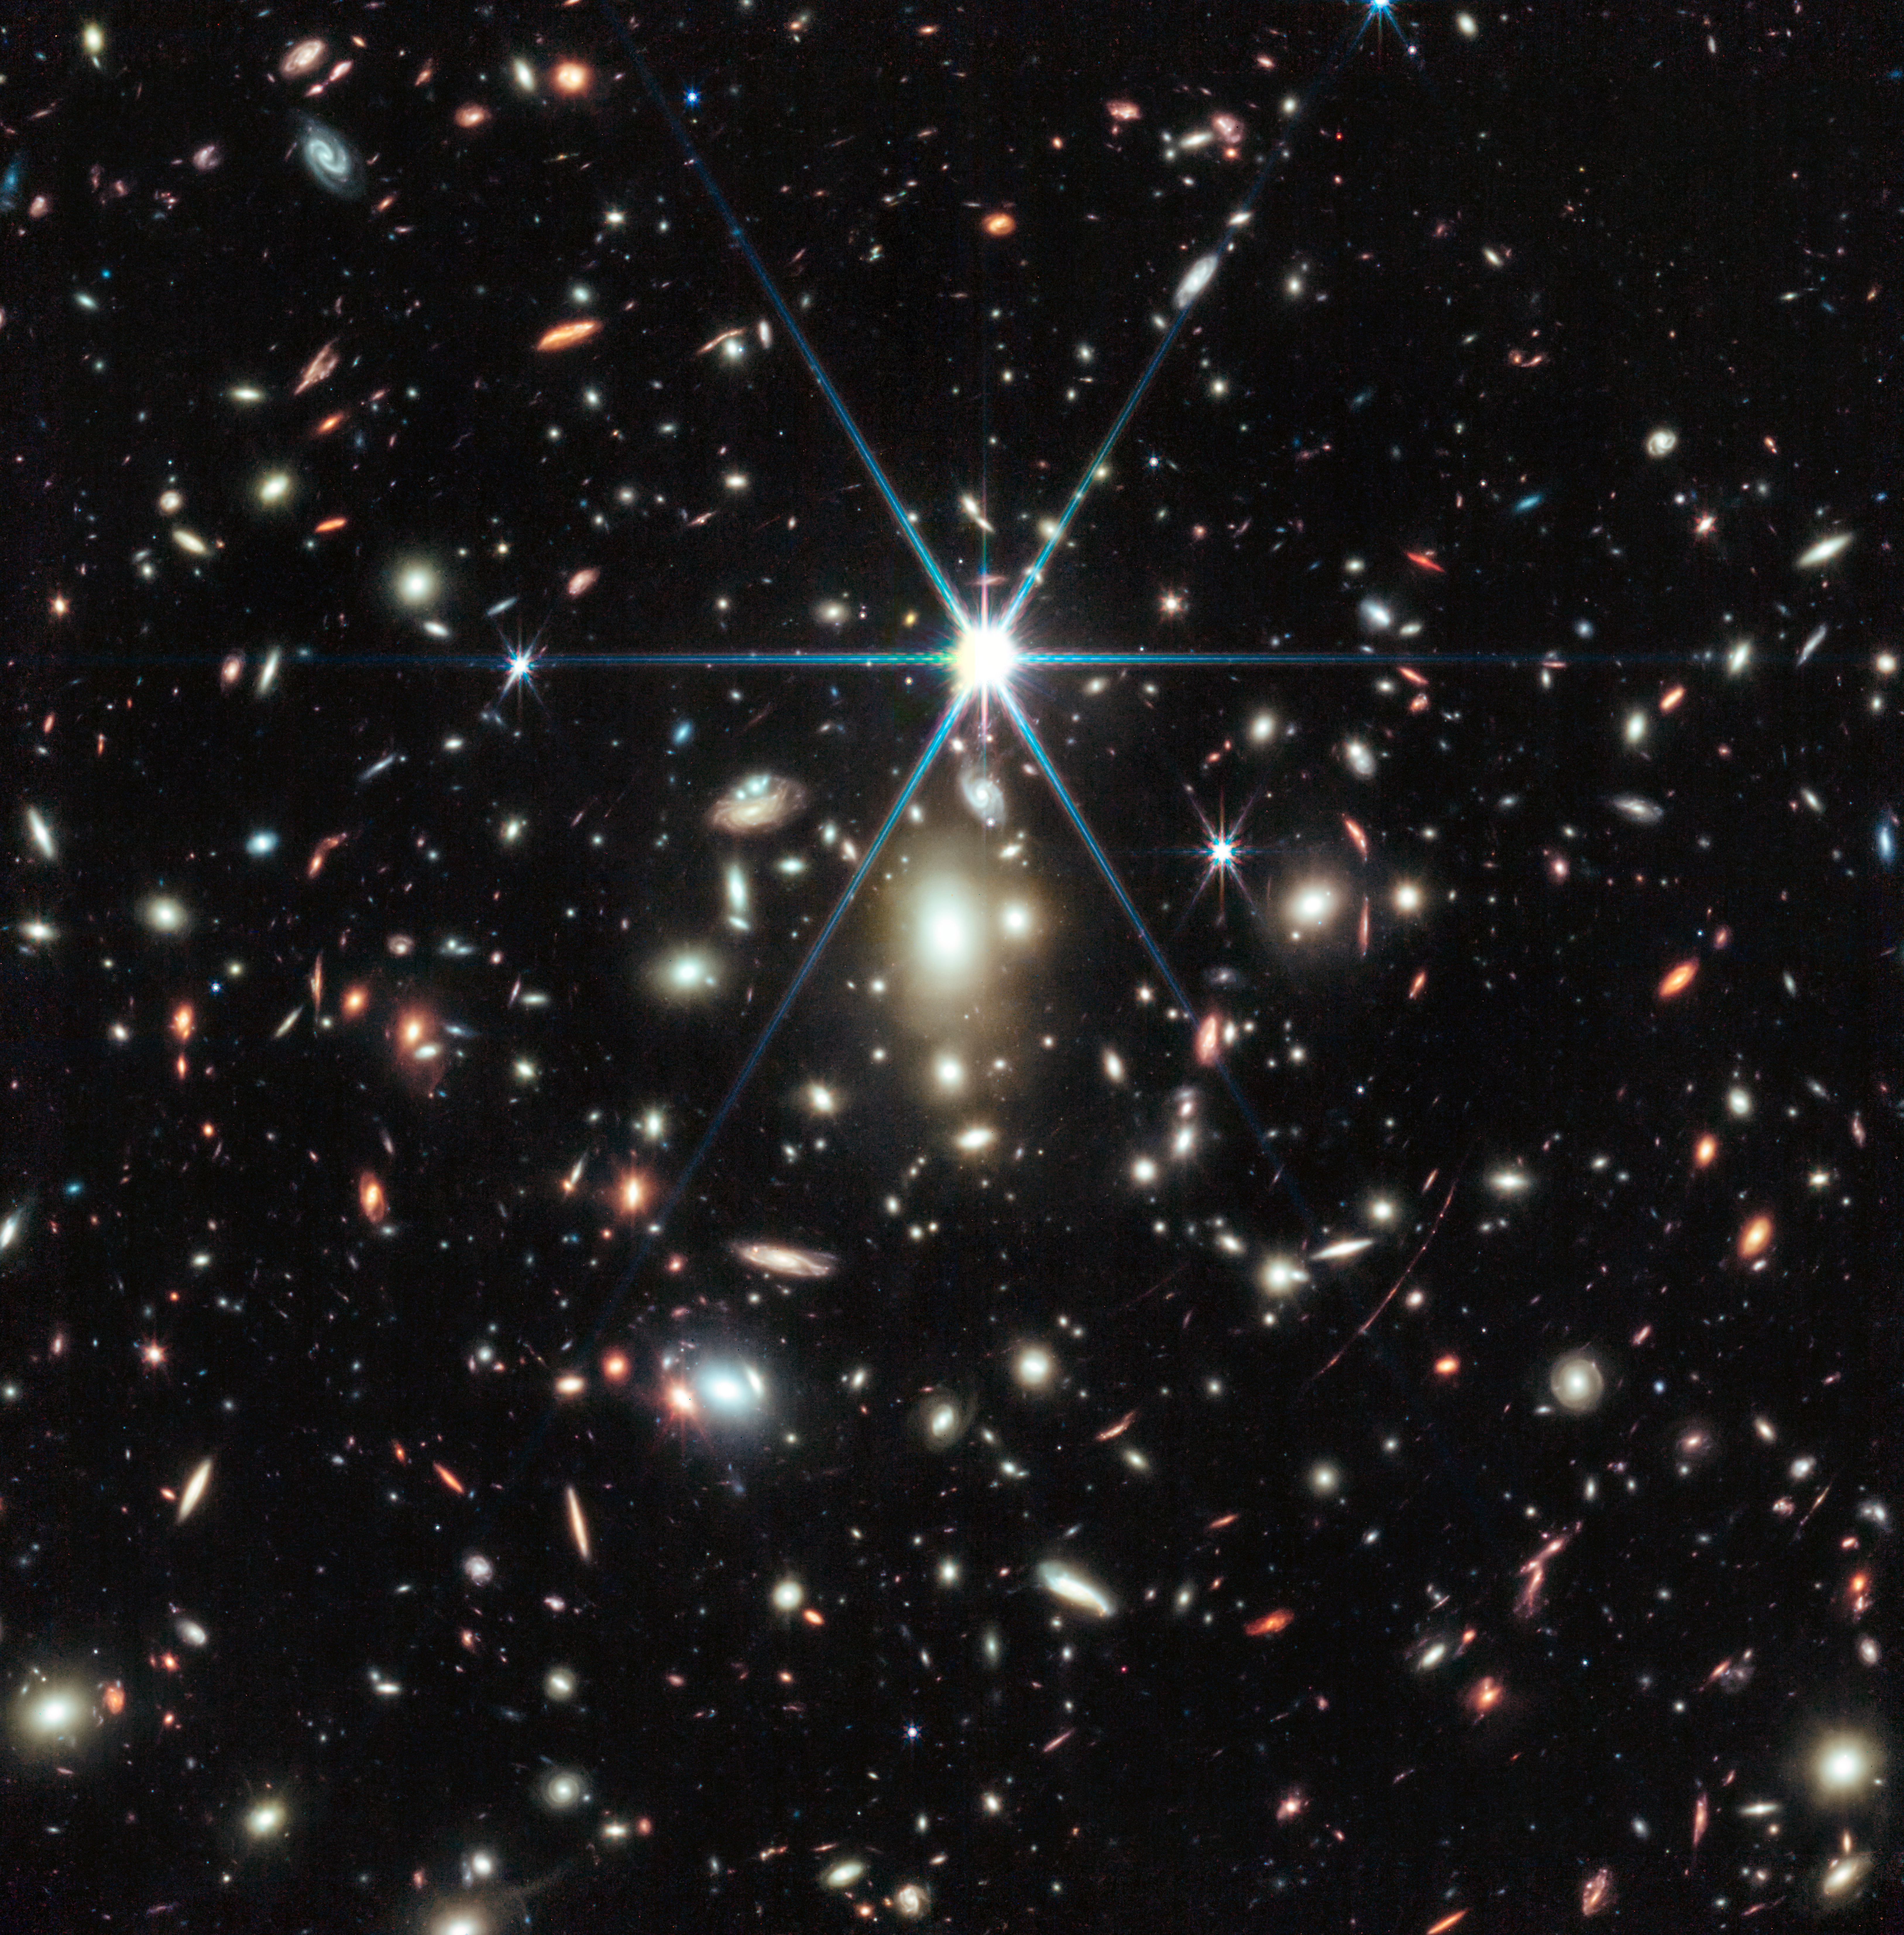

Galaxy cluster WHL0137-08

This image from the NASA/ESA/CSA James Webb Space Telescope of a massive galaxy cluster called WHL0137-08 contains the most strongly magnified galaxy known in the Universe’s first billion years: the Sunrise Arc, and within that galaxy, the most distant star ever detected.

The star, nicknamed Earendel, was first discovered by the NASA/ESA Hubble Space Telescope. Follow-up observations using Webb’s NIRCam (Near-Infrared Camera) reveals the star to be a massive B-type star more than twice as hot as our Sun, and about a million times more luminous.

Earendel is positioned along a ripple in spacetime that gives it extreme magnification, allowing it to emerge into view from its host galaxy, which appears as a red smear across the sky. The star is detectable only due to the combined power of human technology and nature via an effect called gravitational lensing.

While other features in the galaxy appear multiple times due to the gravitational lensing, Earendel only appears as a single point of light even in Webb’s high-resolution infrared imaging. Based on this, astronomers determine the star is magnified by a factor of at least 4000, and thus Earendel is extremely small – the most distant stellar source ever detected. The previous record-holder for the most distant star was detected by Hubble around 4 billion years after the Big Bang.

In this image, the Sunrise Arc appears just below the diffraction spike at the 5 o’clock position. The fuzzier, white galaxies at the centre of the image are part of the galaxy cluster bound together by gravity. The various redder, curved galaxies are background galaxies picked up by Webb’s sensitive mirror.

Webb’s NIRCam also shows other remarkable details in the Sunrise Arc. Features include both young star-forming regions and older established star clusters. On either side of the wrinkle of maximum magnification, which runs right through Earendel, these features are mirrored by the distortion of the gravitational lens. The region forming stars appears elongated, and is estimated to be less than 5 million years old. Smaller dots on either side of Earendel are two images of one older, more established star cluster, estimated to be 10 million years or older. Astronomers determined this star cluster is gravitationally bound and likely to persist until the present day. This shows us how the globular clusters in our own Milky Way might have looked when they formed 13 billion years ago.

Astronomers are currently analysing data from Webb’s NIRSpec (Near-Infrared Spectrograph) instrument observations of the Sunrise Arc galaxy and Earendel, which will provide precise composition and distance measurements for the galaxy.

Since Hubble’s discovery of Earendel, Webb has detected other very distant stars using this technique, though none quite as far as Earendel. The discoveries have opened a new realm of the Universe to stellar physics, and new subject matter to scientists studying the early Universe, where once galaxies were the smallest detectable cosmic objects. There is cautious hope that this could be a step toward the eventual detection of one of the very first generation of stars, composed only of the raw ingredients of the Universe created in the big bang – hydrogen and helium.

Credit: NASA, ESA, CSA, D. Coe (AURA/STScI for ESA), Z. Levay